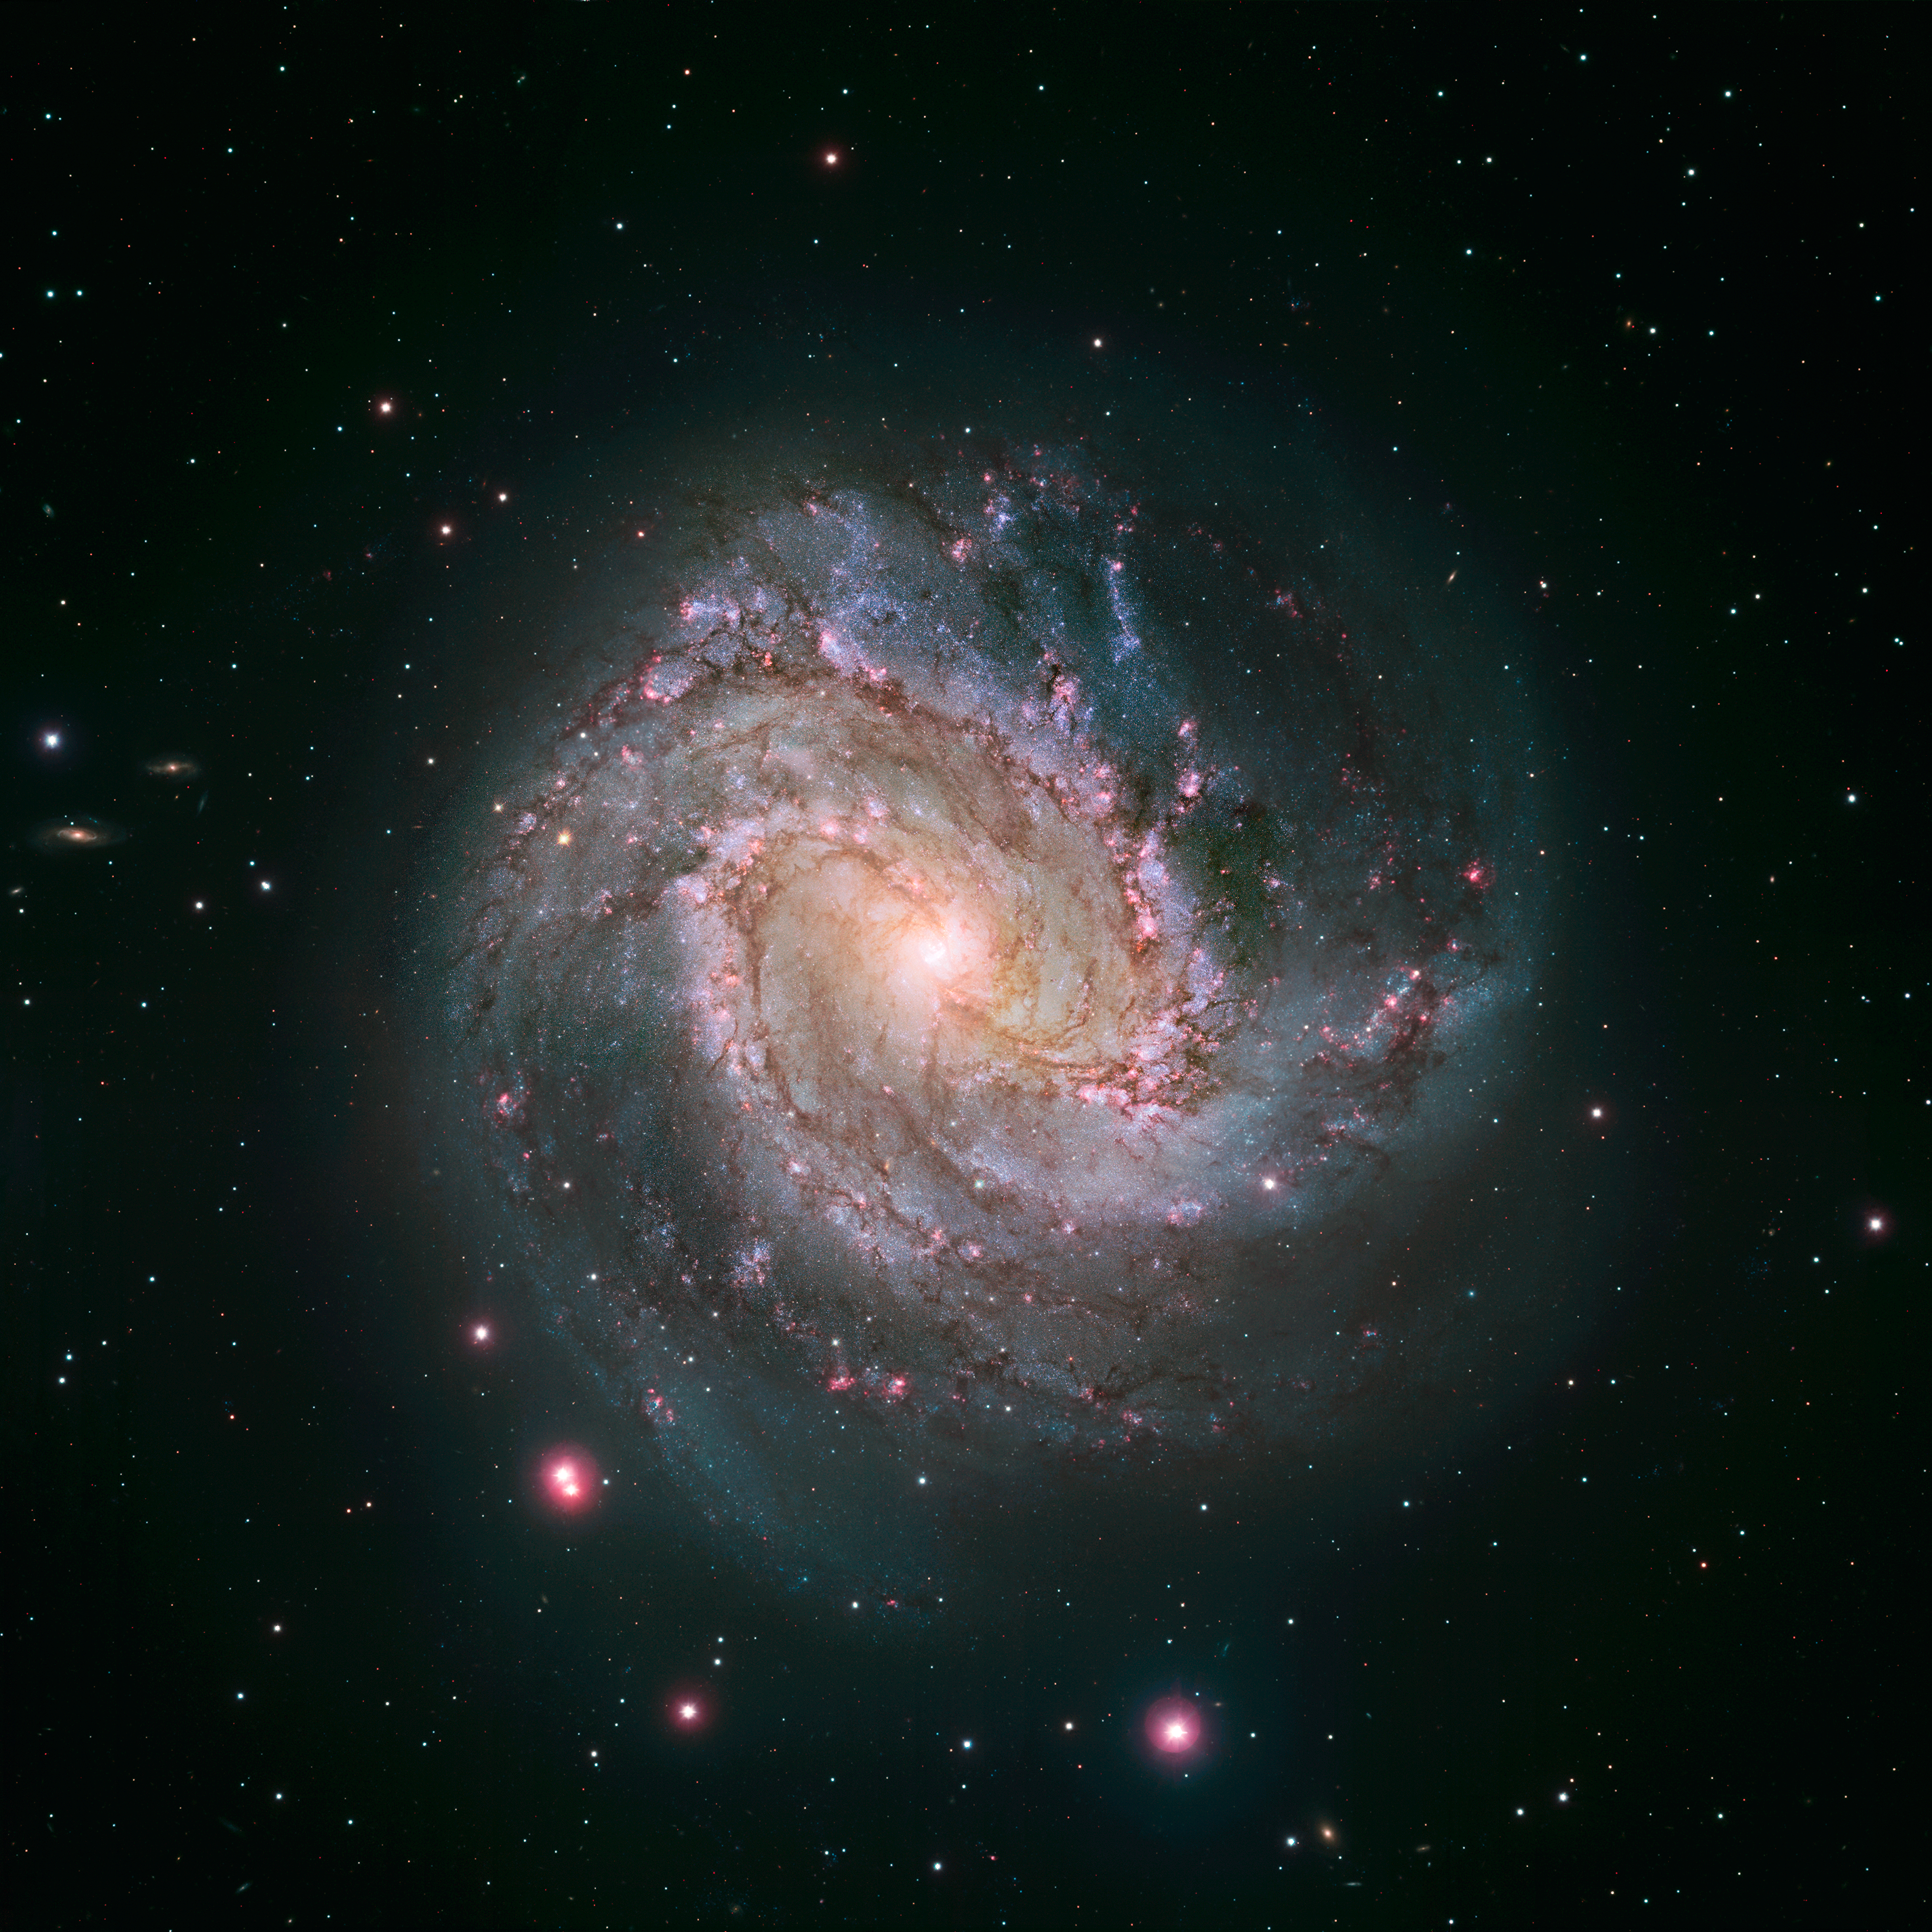

Hubble and Magellan composite image of Messier 83

This view of Messier 83 shows new Hubble data combined with ground-based data from the Giant Magellan Telescope, which shows a wider field of view so the whole galaxy is visible.

Credit: NASA, ESA, and the Hubble Heritage Team (STScI/AURA) Acknowledgment: W. Blair (STScI/JHU), Carnegie Institution of Washington (Las Campanas Observatory), and NOAO